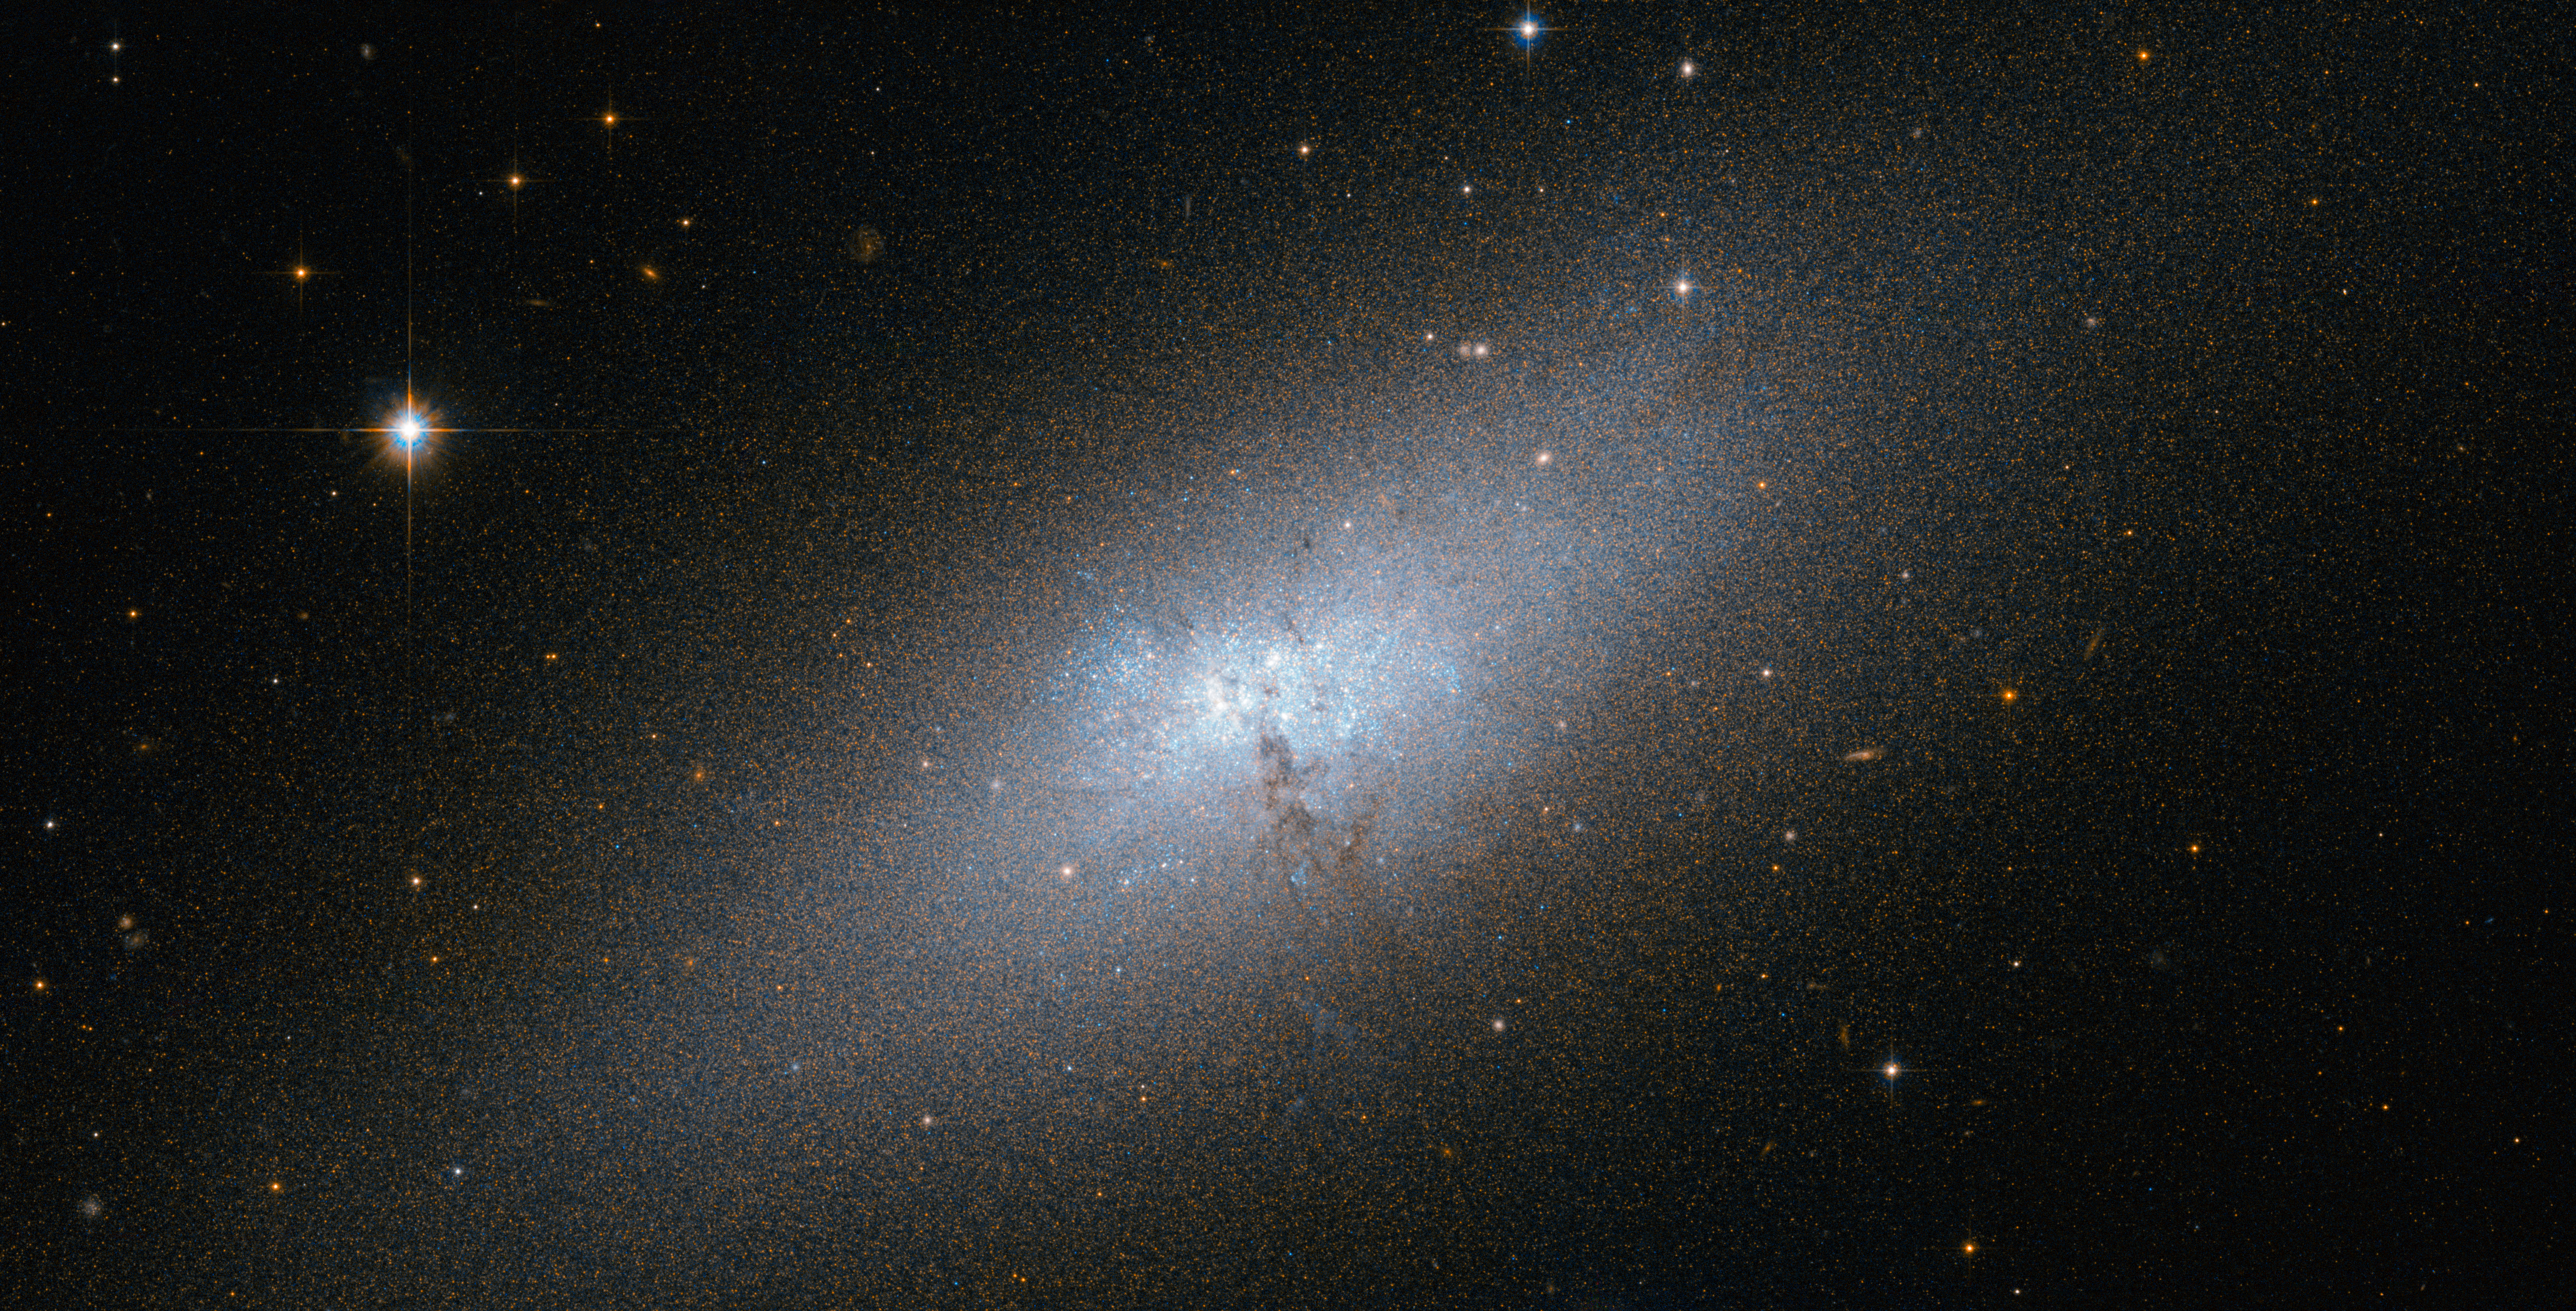

A peculiar compact blue dwarf galaxy

The NASA/ESA Hubble Space Telescope provides us this week with an impressive image of the irregular galaxy NGC 5253.

NGC 5253 is one of the nearest of the known Blue Compact Dwarf (BCD) galaxies, and is located at a distance of about 12 million light-years from Earth in the southern constellation of Centaurus. The most characteristic signature of these galaxies is that they harbour very active star-formation regions. This is in spite of their low dust content and comparative lack of elements heavier than hydrogen and helium, which are usually the basic ingredients for star formation.

These galaxies contain molecular clouds that are quite similar to the pristine clouds that formed the first stars in the early Universe, which were devoid of dust and heavier elements. Hence, astronomers consider the BCD galaxies to be an ideal testbed for better understanding the primordial star-forming process.

NGC 5253 does contain some dust and heavier elements, but significantly less than the Milky Way galaxy. Its central regions are dominated by an intense star forming region that is embedded in an elliptical main body, which appears red in Hubble’s image. The central starburst zone consists of a rich environment of hot, young stars concentrated in star clusters, which glow in blue in the image. Traces of the starburst itself can be seen as a faint and diffuse glow produced by the ionised oxygen gas.

The true nature of BCD galaxies has puzzled astronomers for a long time. Numerical simulations following the current leading cosmological theory of galaxy formation, known as the Lambda Cold Dark Matter model, predict that there should be far more satellite dwarf galaxies orbiting big galaxies like the Milky Way. Astronomers refer to this discrepancy as the Dwarf Galaxy Problem.

This galaxy is considered part of the Centaurus A/Messier 83 group of galaxies, which includes the famous radio galaxy Centaurus A and the spiral galaxy Messier 83. Astronomers have pointed out the possibility that the peculiar nature of NGC 5253 could result from a close encounter with Messier 83, its closer neighbour.

This image was taken with the Hubble’s Advanced Camera for Surveys, combining visible and infrared exposures. The field of view in this image is approximately 3.4 by 3.4 arcminutes.

A version of this image was entered into the Hubble’s Hidden Treasures image processing competition by contestant Nikolaus Sulzenauer.

Credit: ESA/Hubble & NASA
Acknowledgement: N. Sulzenauer